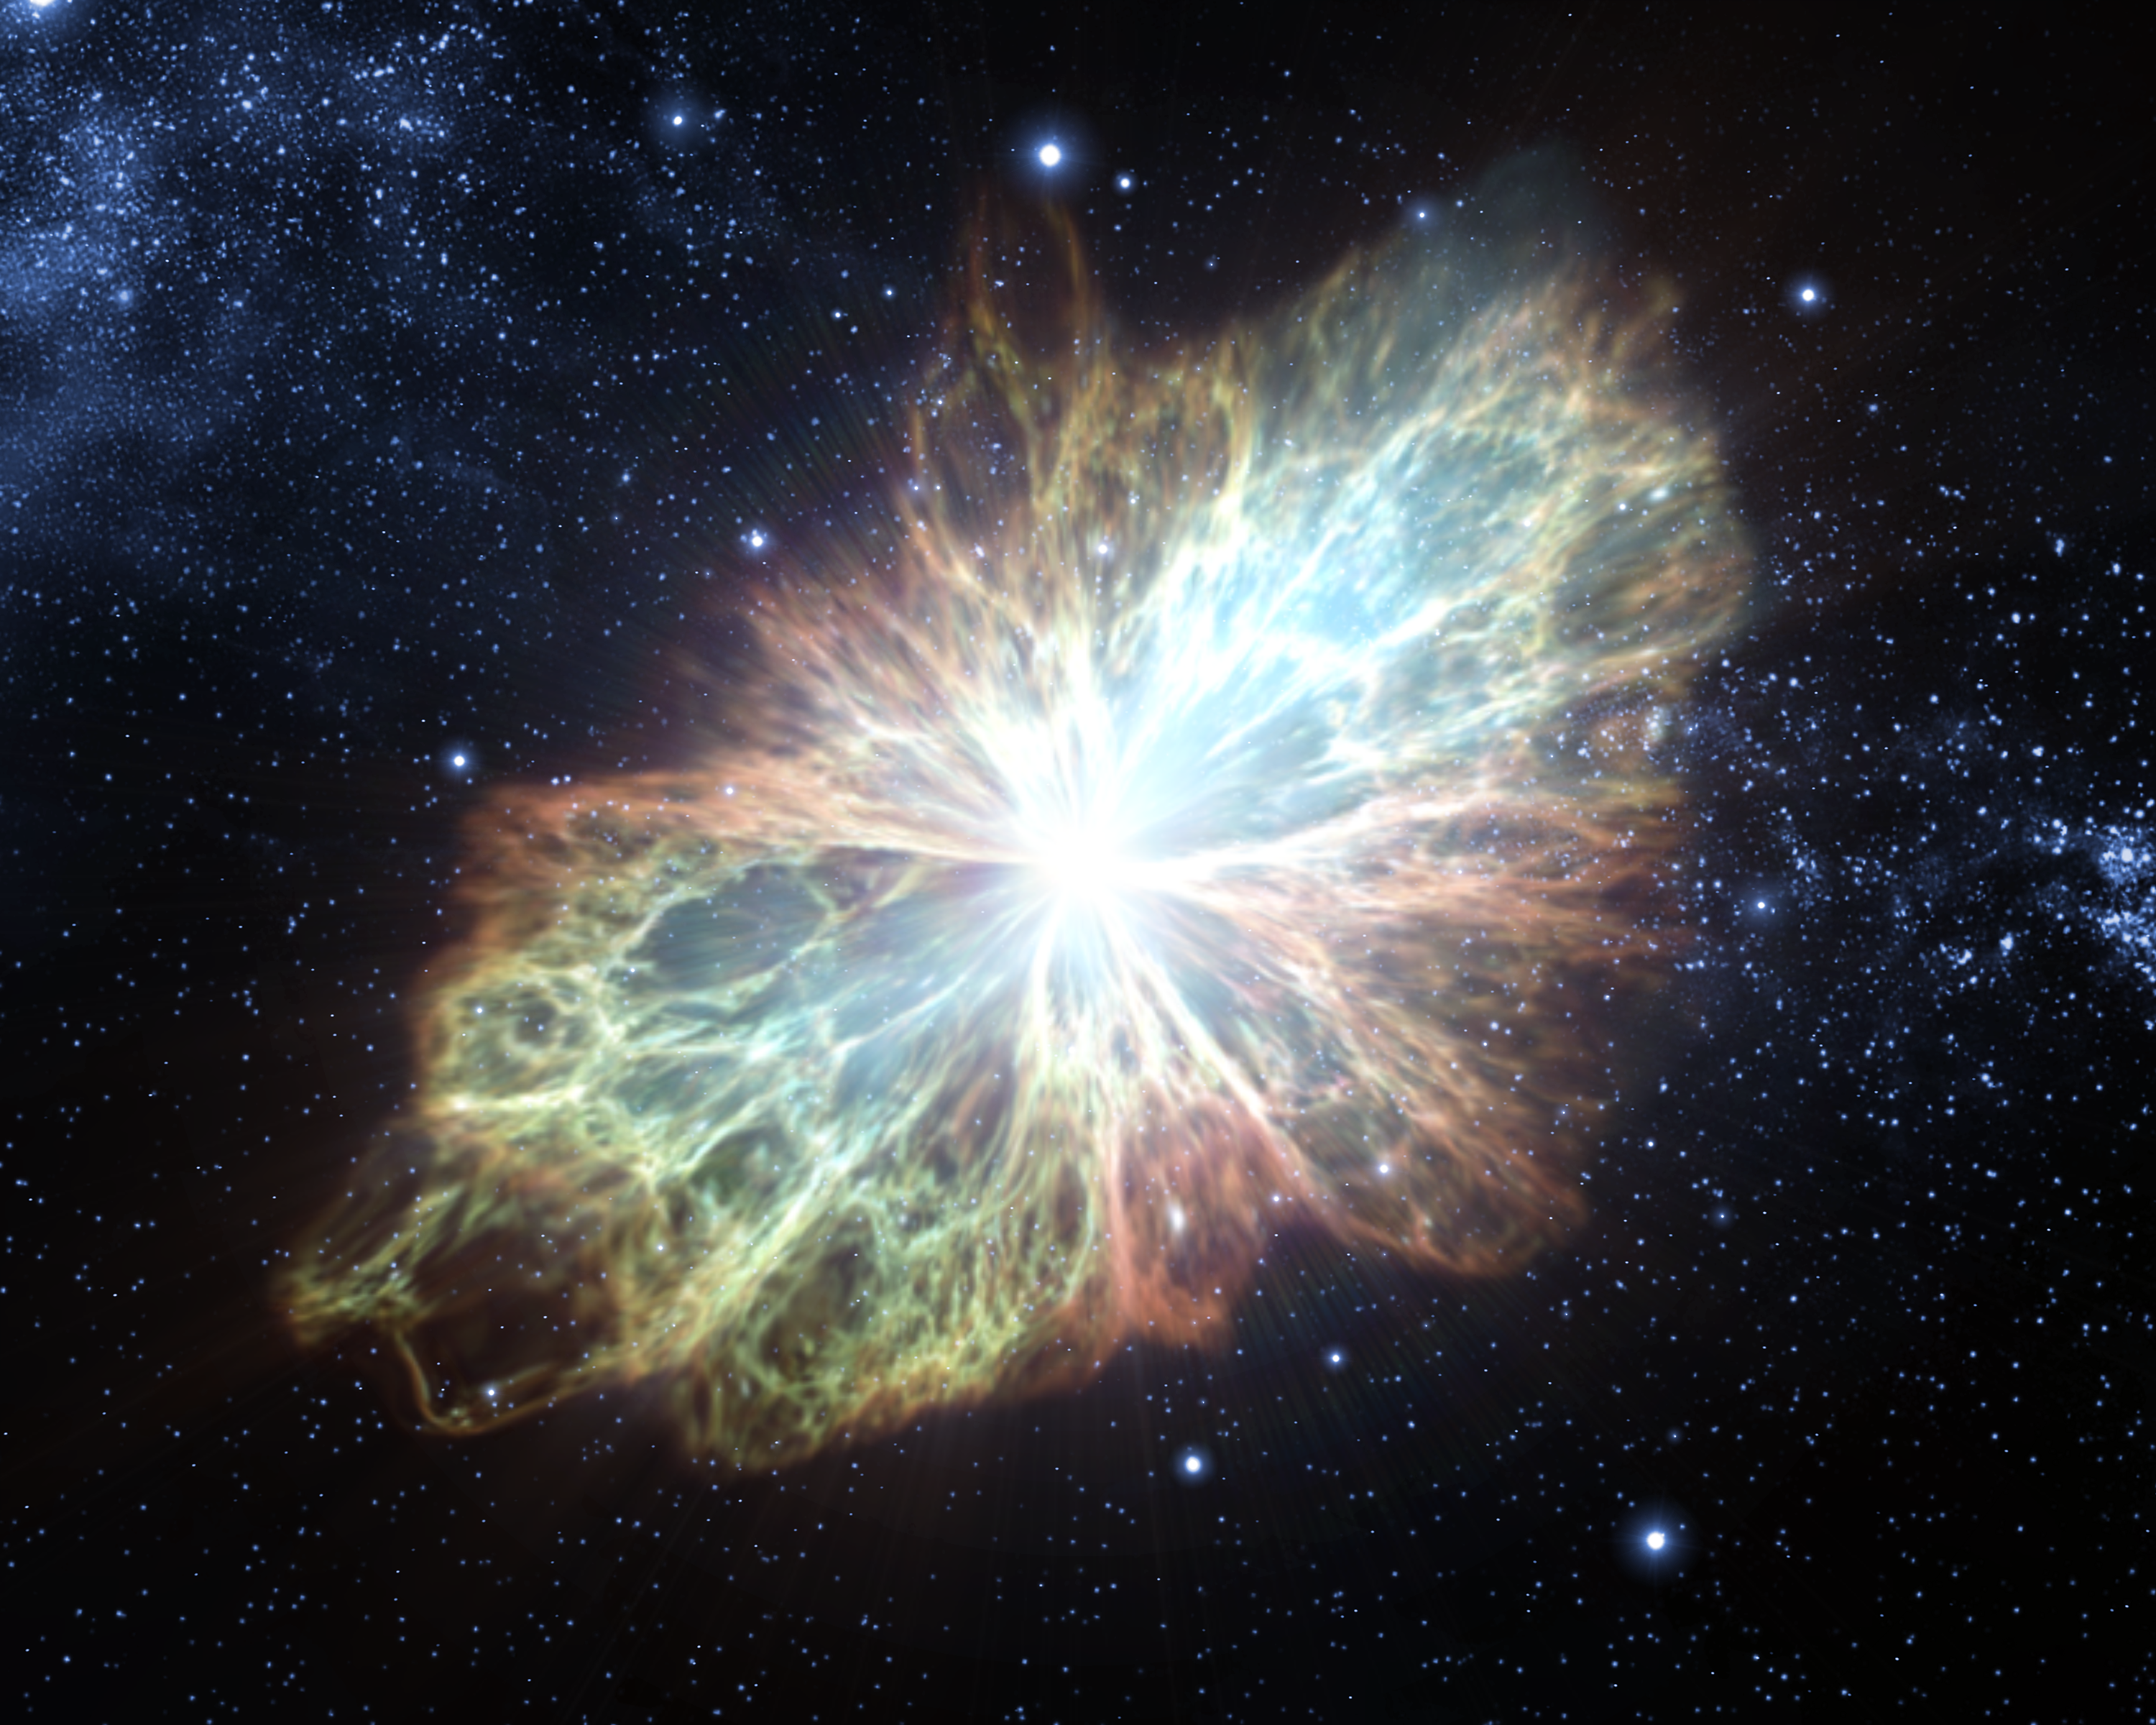

Animation still image 5 (artist's impression)

Still image from the animation of the 1054 supernova that created the Crab Nebula. Note: artist's impression.

Credit: ESA/Hubble